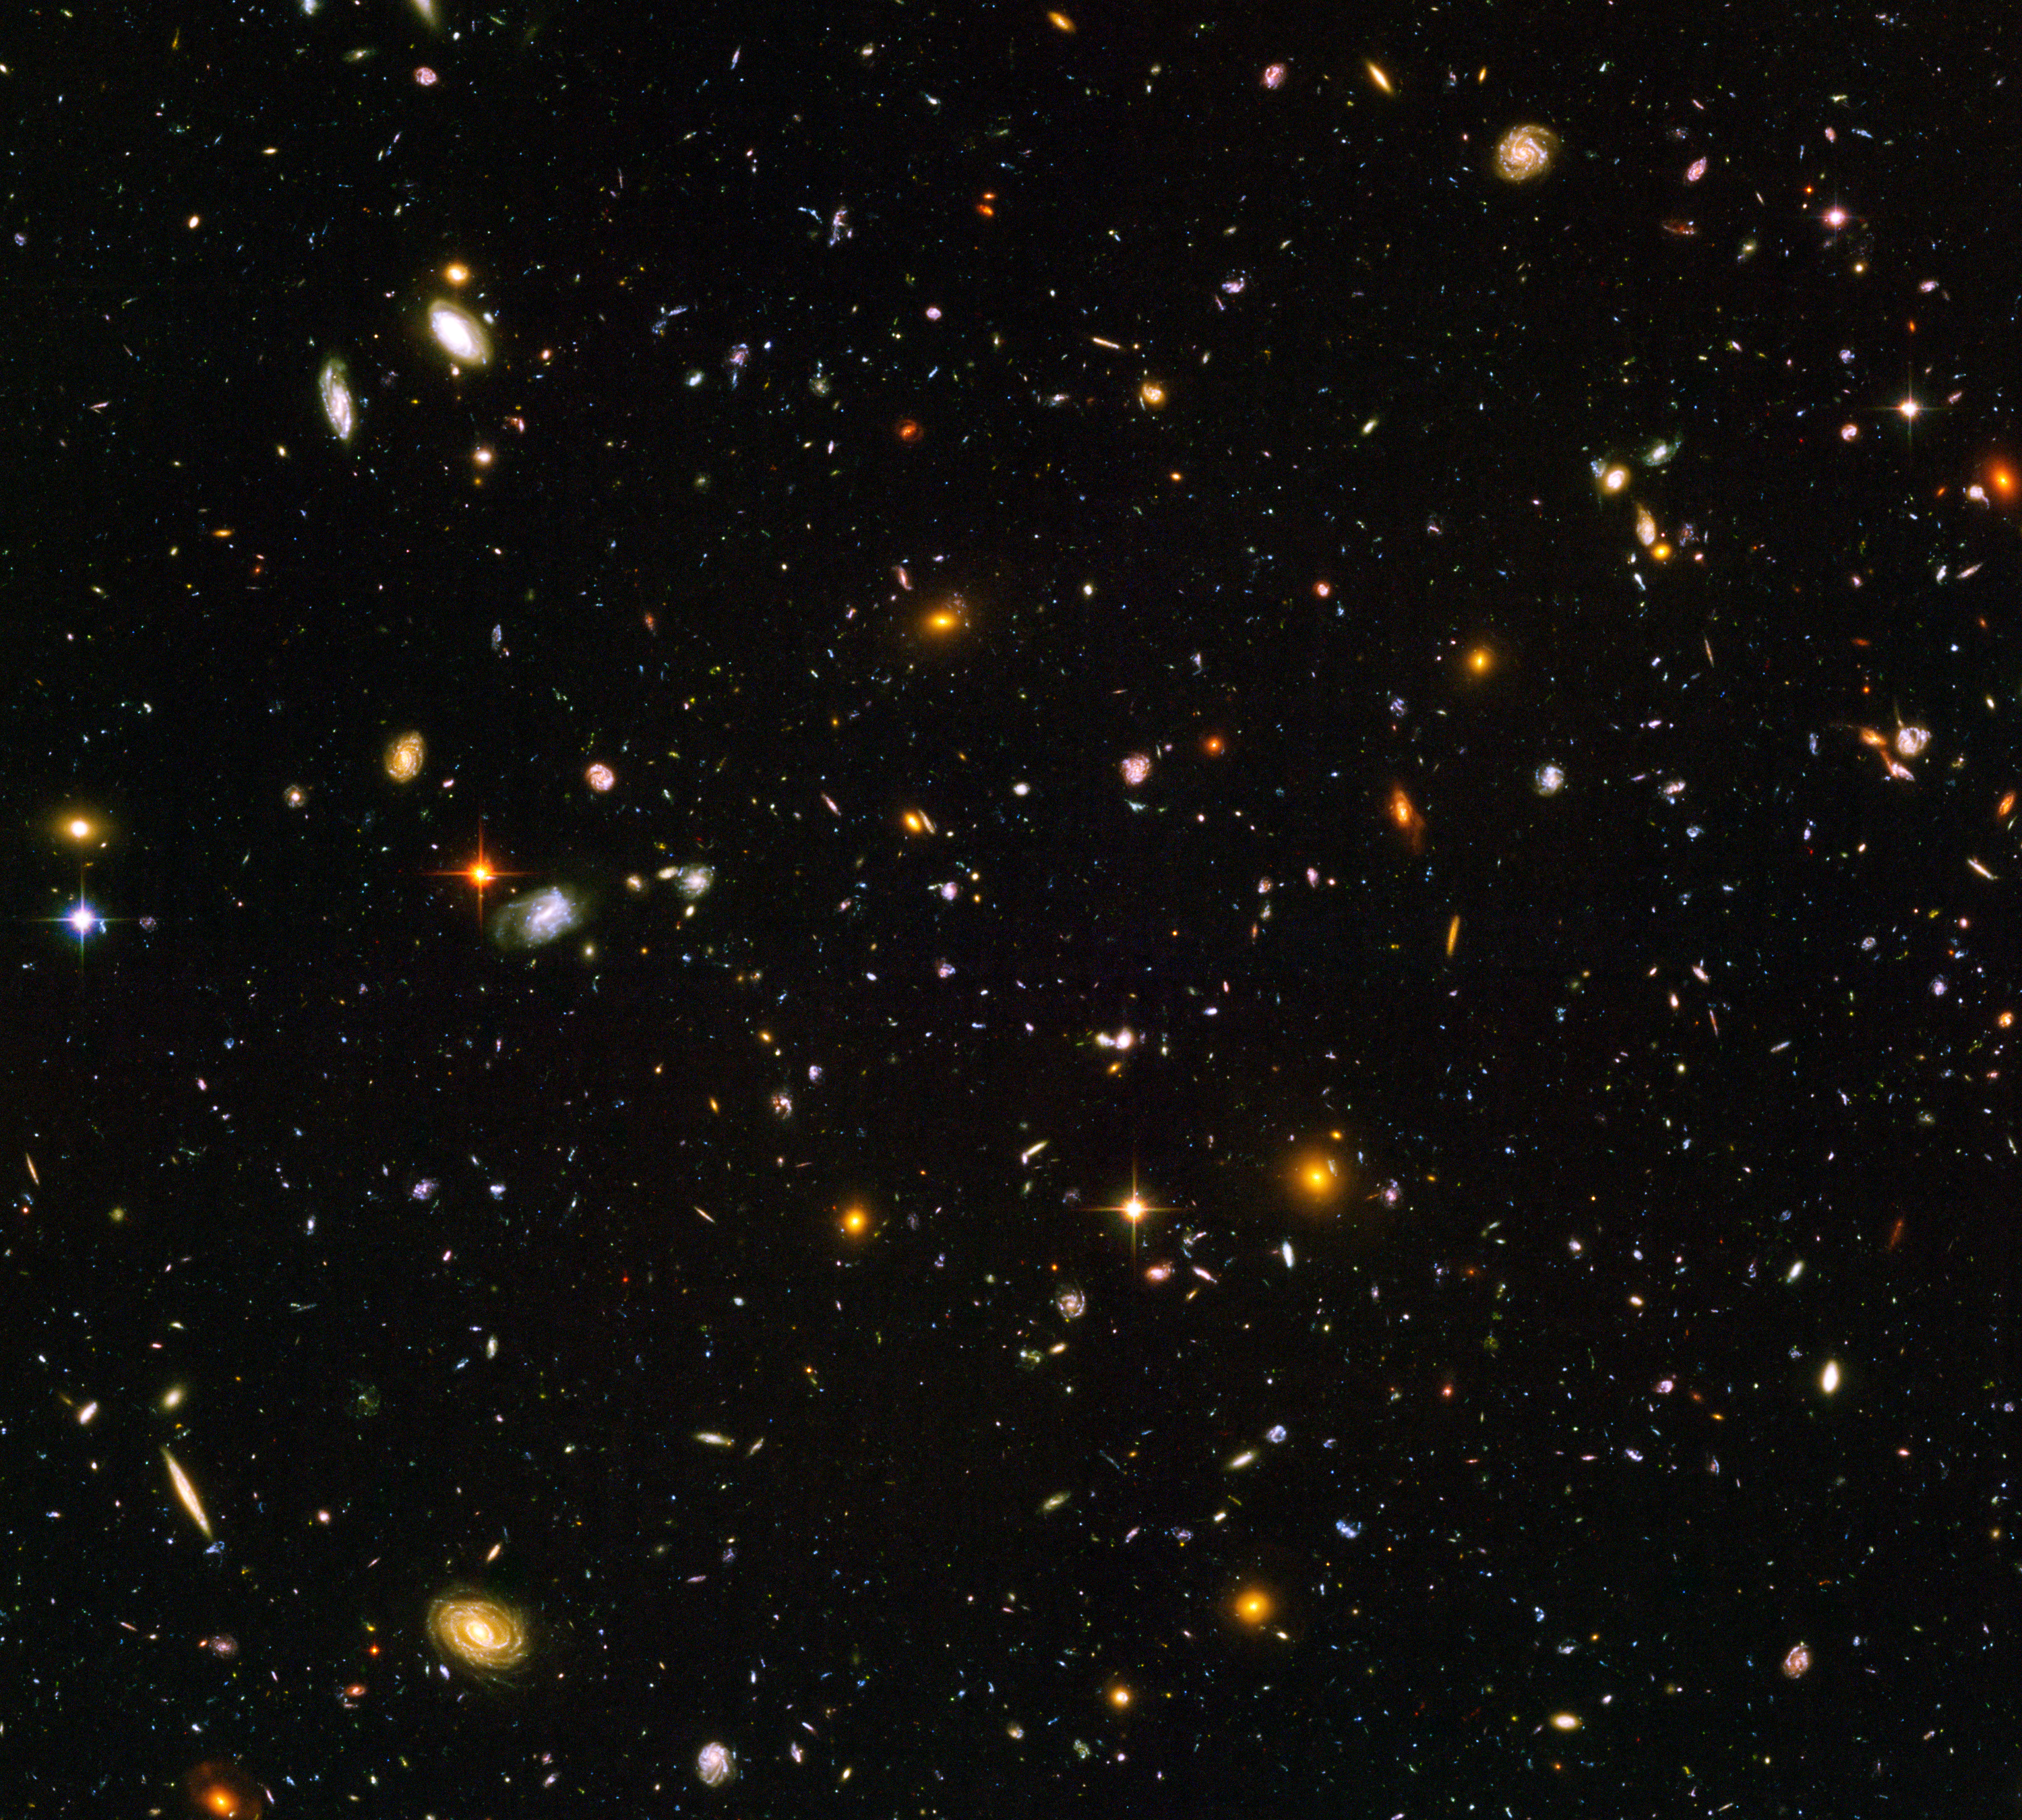

Hubble Ultra Deep Field

The Hubble Ultra Deep Field Image.

Credit: NASA, ESA, and N. Pirzkal (European Space Agency/STScI) and the HUDF Team (STScI)